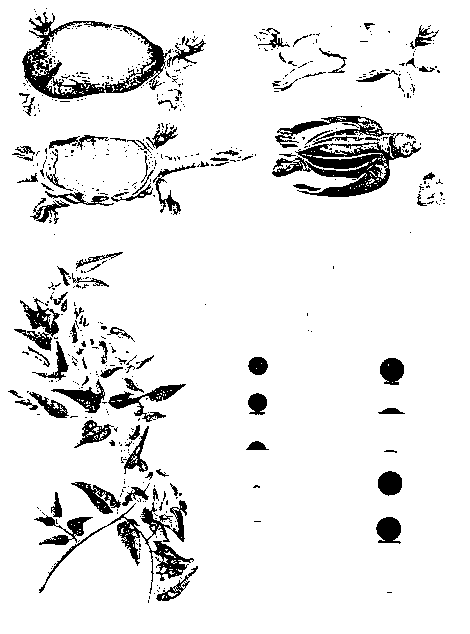

Drawing of 1769 transit of Venus by Captain James Cook and Charles Green

Illustrations of various flora and fauna, and in the lower right hand corner, the 1769 transit of Venus.

Credit: Armagh Observatory